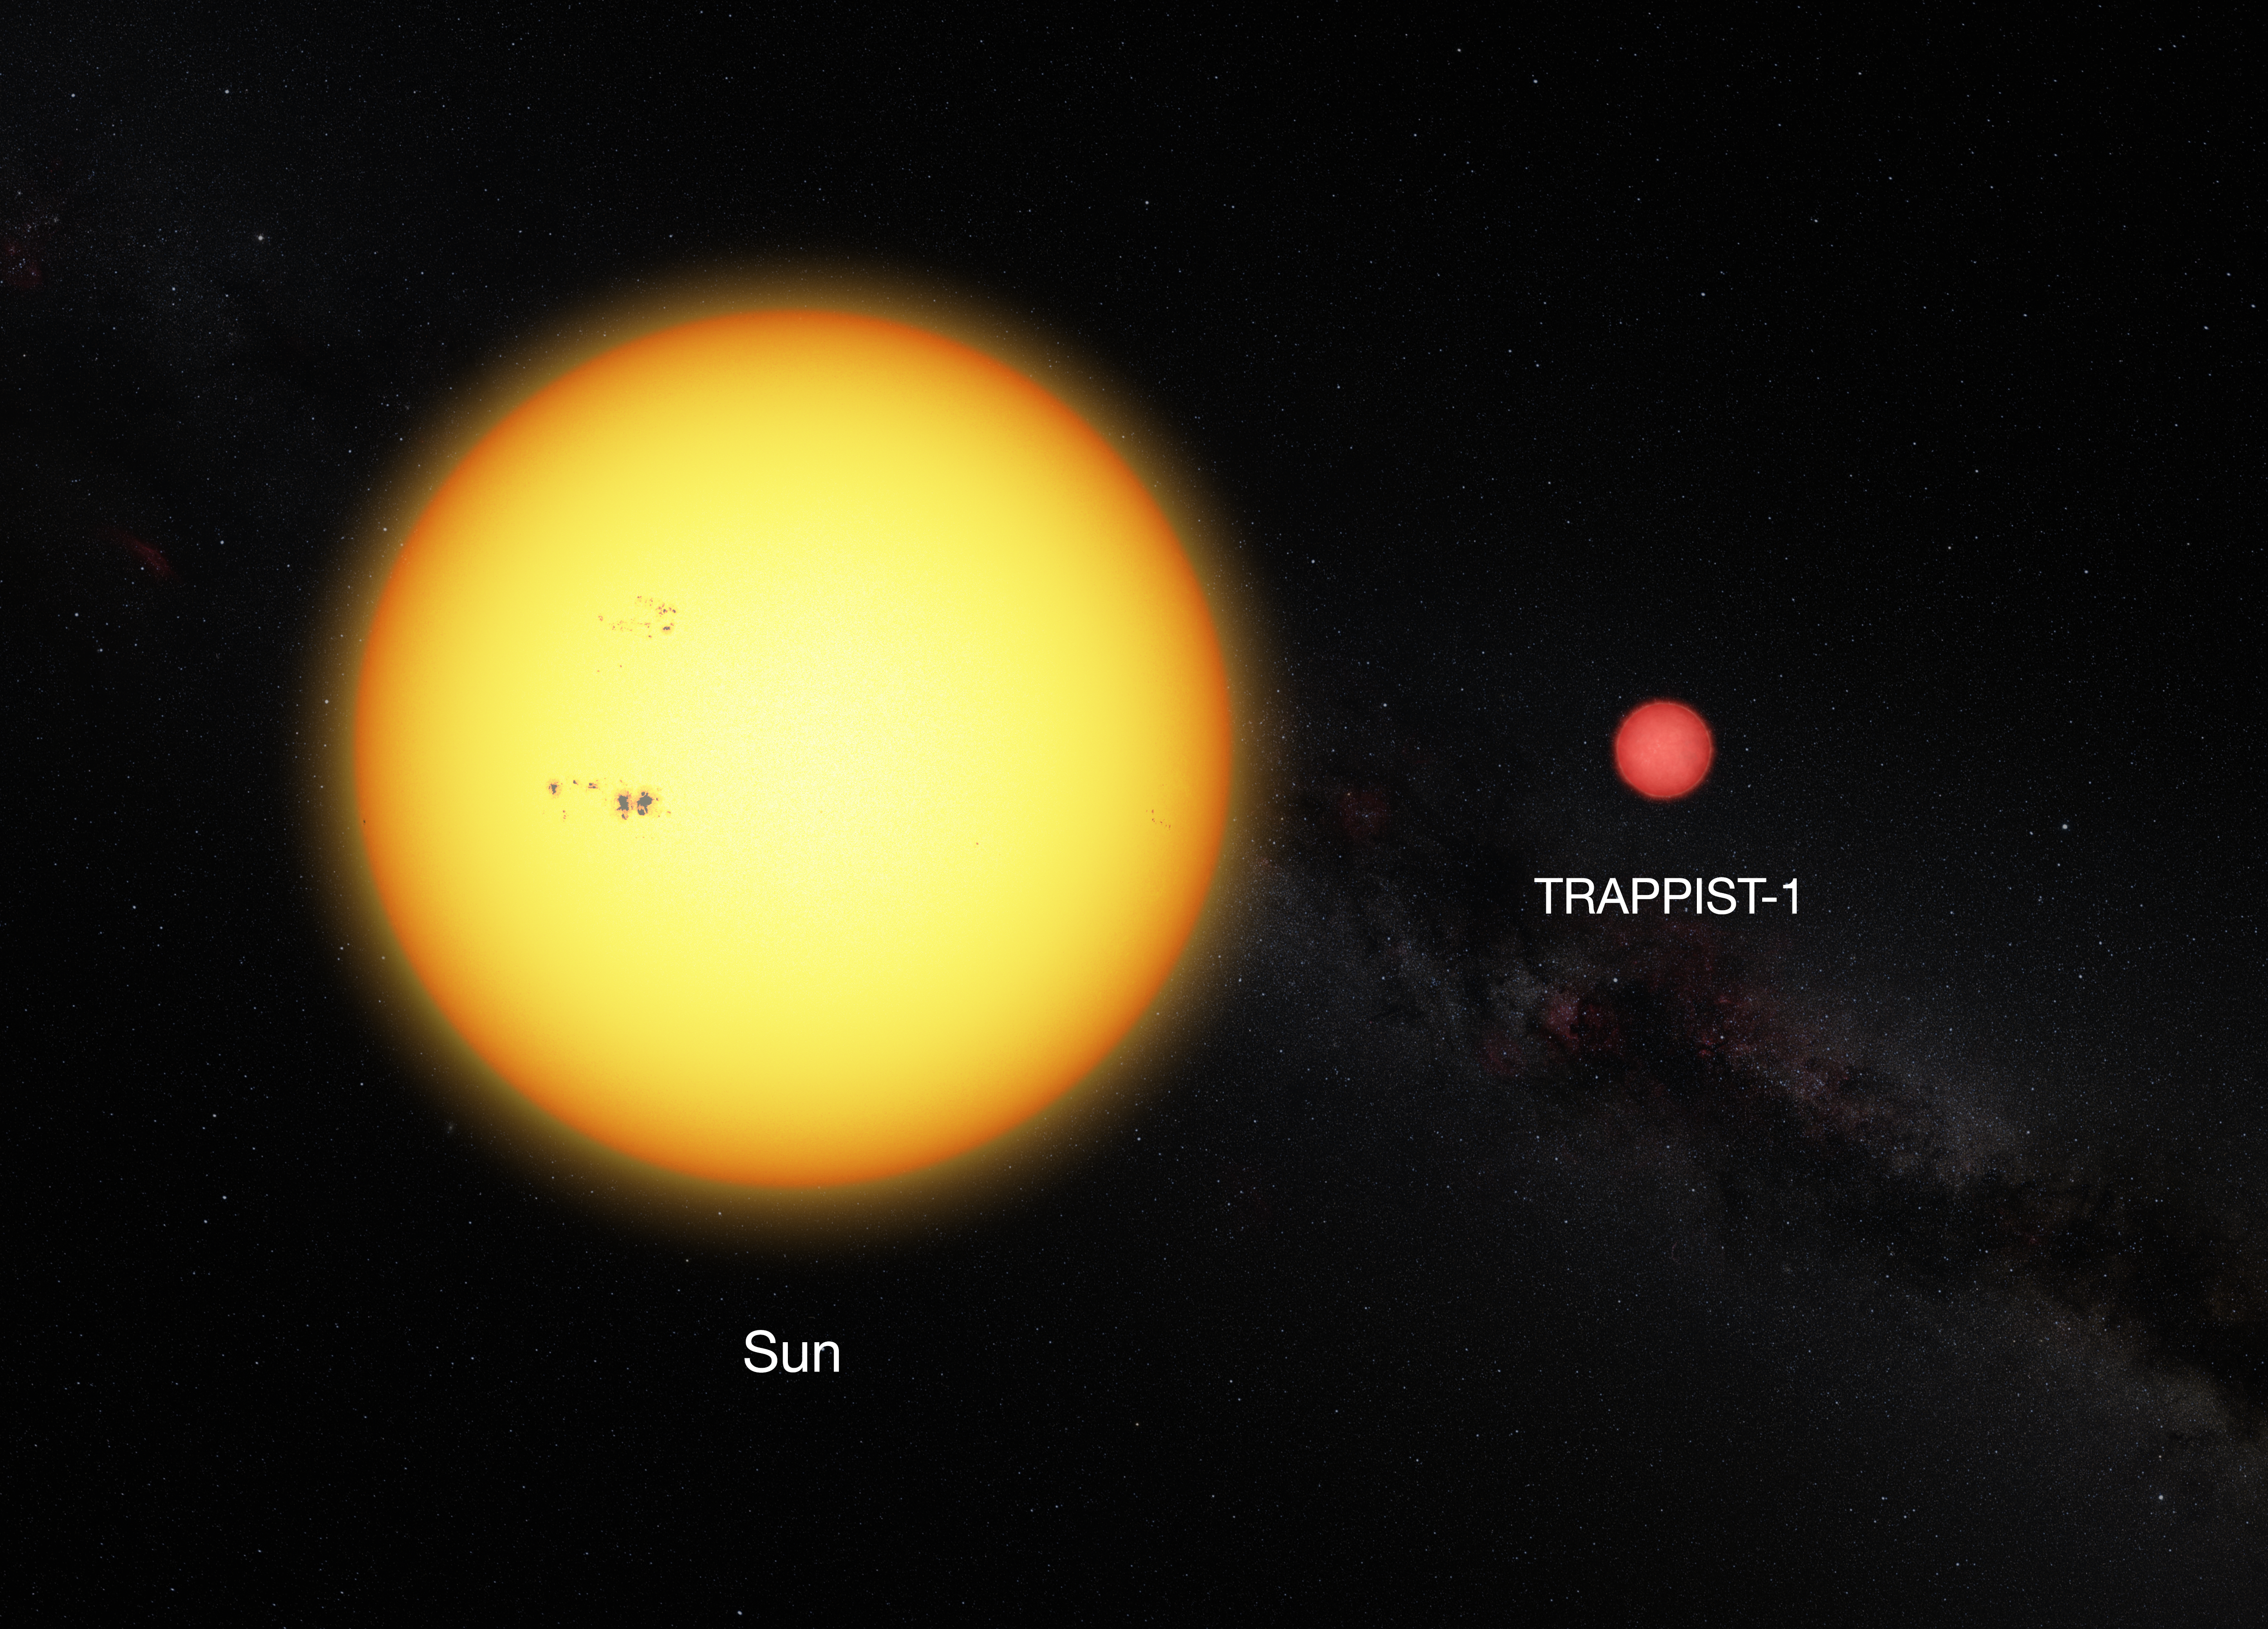

Comparison between the Sun and the ultracool dwarf star TRAPPIST-1

This picture shows the Sun and the ultracool dwarf star TRAPPIST-1 to scale. The faint star has only 11% of the diameter of the sun and is much redder in colour.

As the planets found around TRAPPIST-1 orbit much closer to their star than Mercury is to the Sun, they are exposed to similar levels of radiation as Venus, Earth and Mars in the Solar System.

Credit: ESO